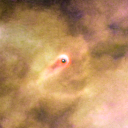

205-421

One of 42 new proplyds discovered in the Orion Nebula, 205-421 is one of the bright proplyds that lies relatively close to the nebula’s brightest star, Theta 1 Orionis C. The tadpole-shaped tail is actually a jet of matter flowing away from the excited cusp.

Credit: NASA/ESA and L. Ricci (ESO)